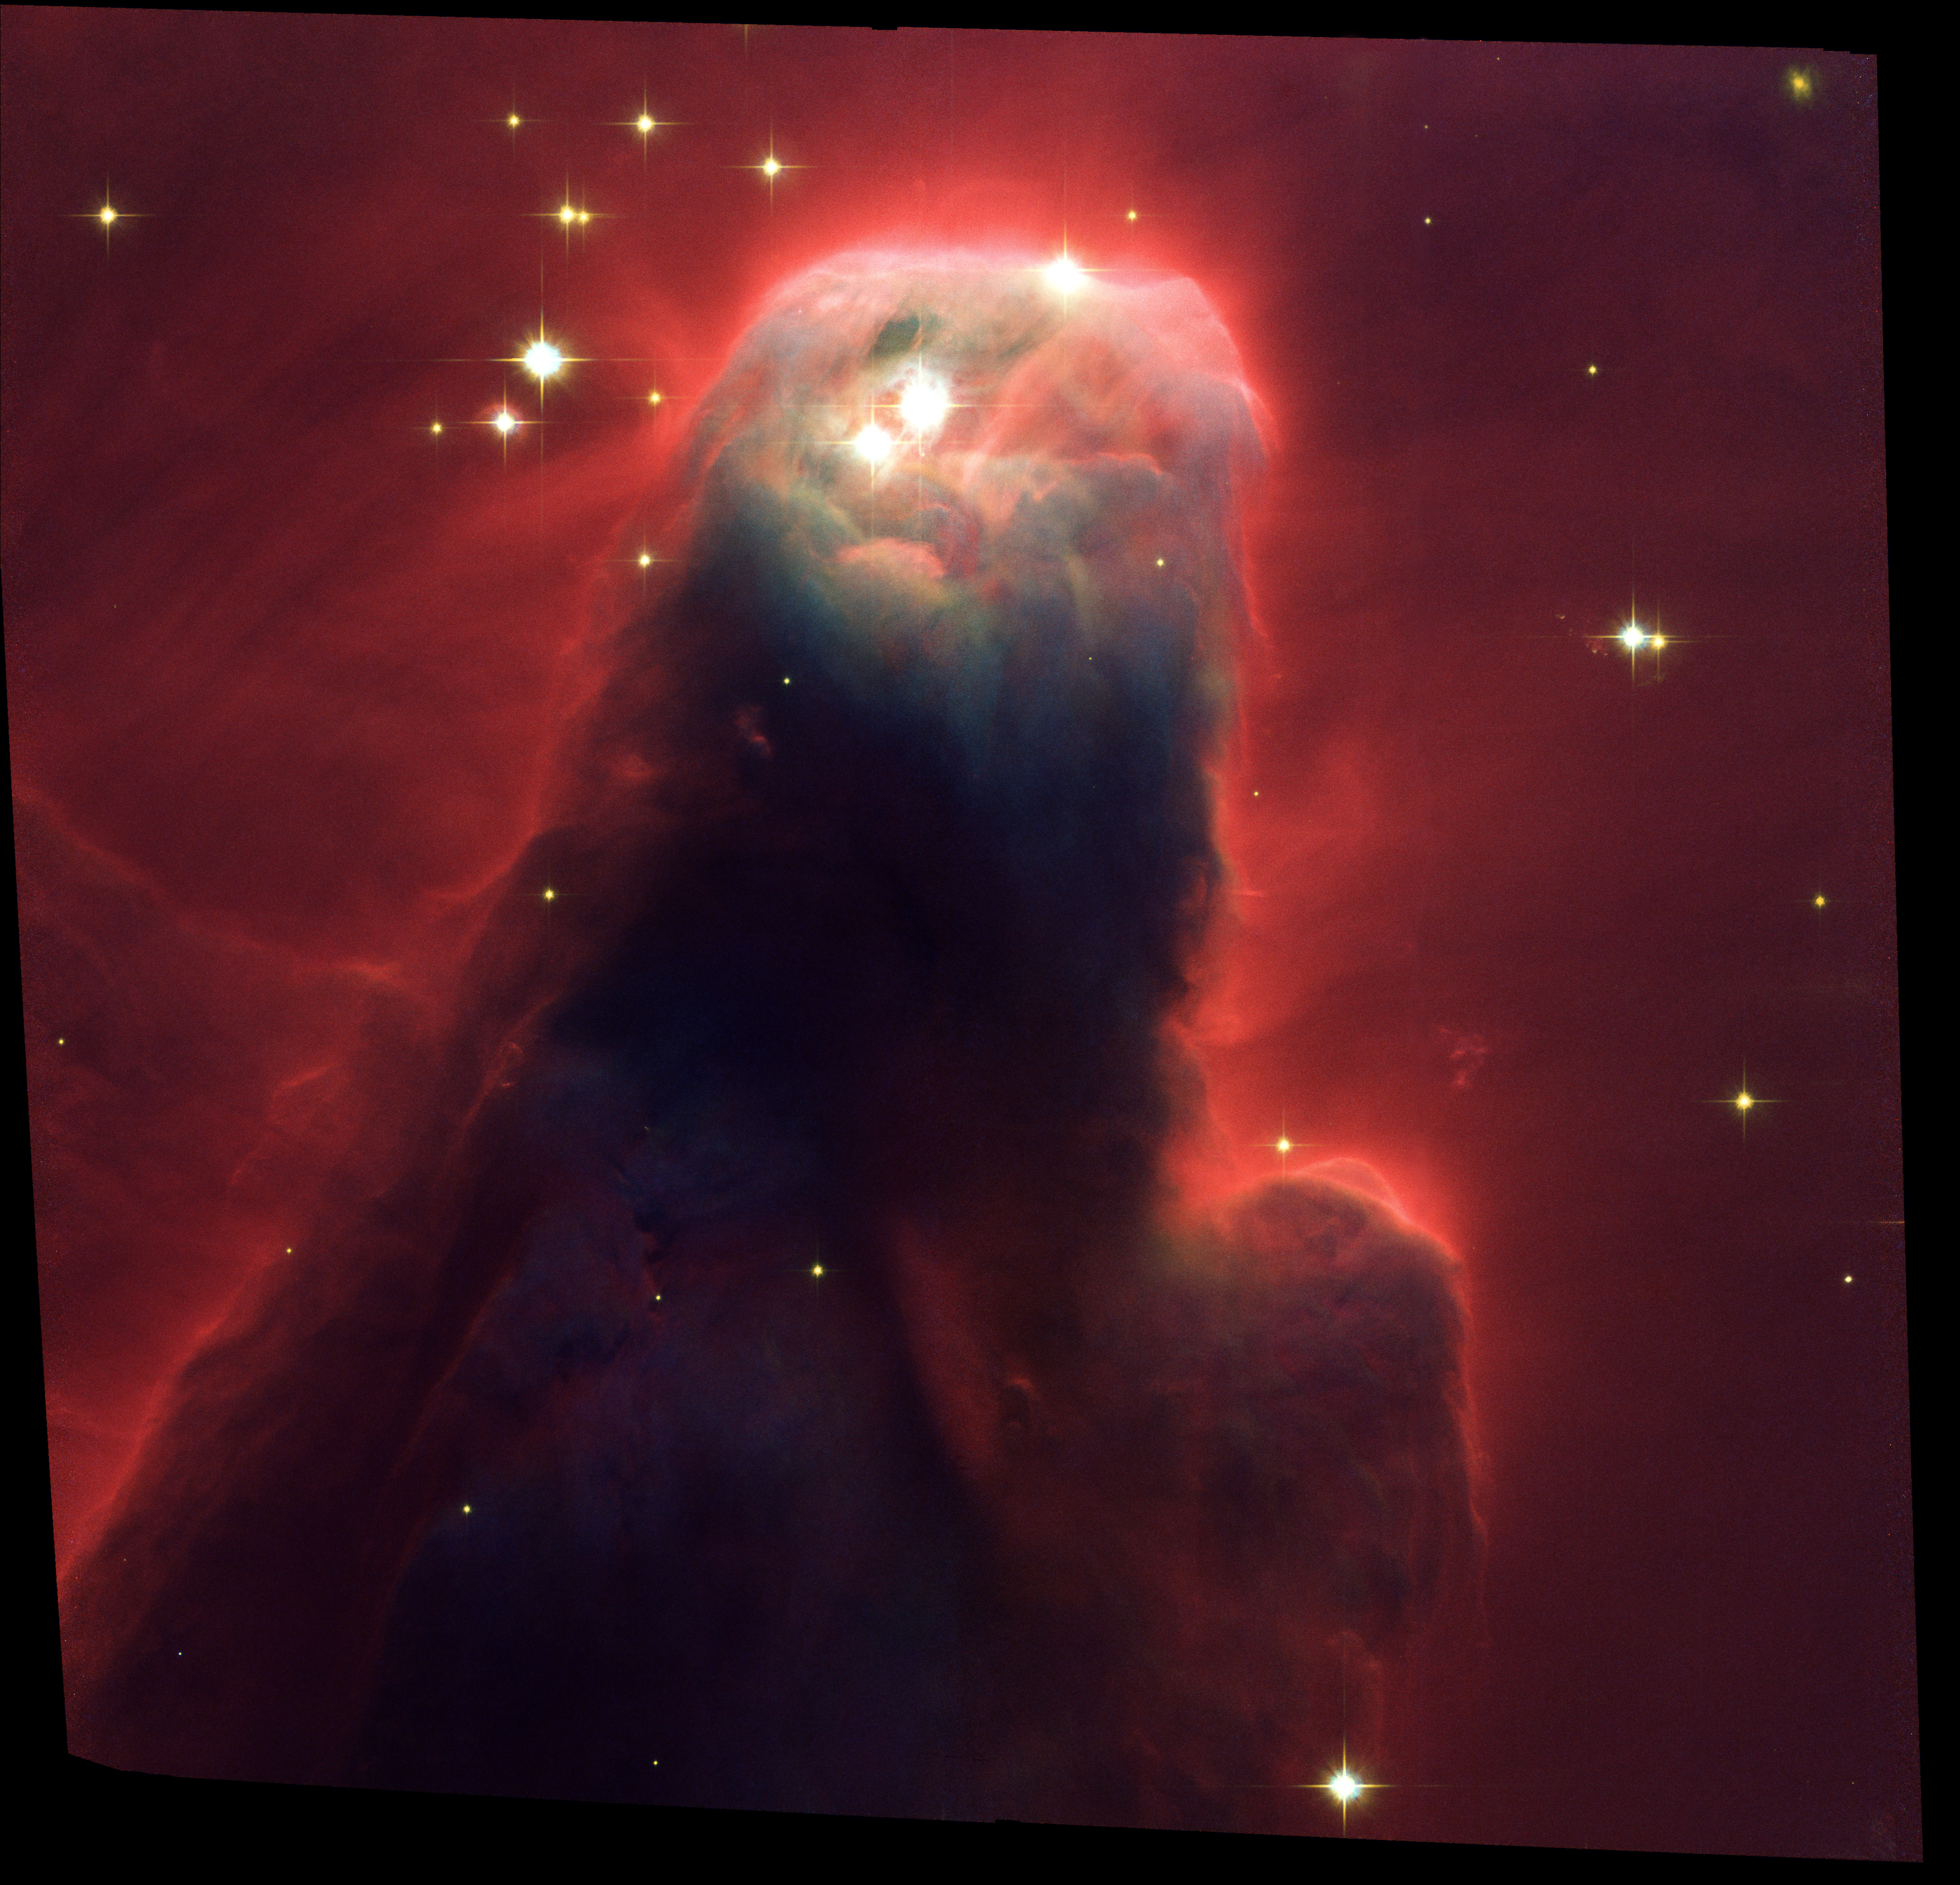

Cone Nebula/NGC 2264 (ACS Full Field Image)

Resembling a nightmarish beast rearing its head from a crimson sea, this monstrous object is actually an innocuous pillar of gas and dust. Called the Cone Nebula (and cataloged NGC 2264) is so named because, in ground-based images, it has a conical shape. This giant pillar resides in a turbulent star-forming region. NASA's Hubble Space Telescope imaged the "Cone Nebula," a nebula close to home. It exhibits a craggy-looking mountaintop of cold gas and dust that is a cousin to Hubble's iconic "pillars of creation" in the Eagle Nebula, photographed in 1995.

Credit: NASA, H. Ford (JHU), G. Illingworth (UCSC/LO), M.Clampin (STScI), G. Hartig (STScI), the ACS Science Team, and ESAThe ACS Science Team: H. Ford, G. Illingworth, M. Clampin, G. Hartig, T. Allen, K. Anderson, F. Bartko, N. Benitez, J. Blakeslee, R. Bouwens, T. Broadhurst, R. Brown, C. Burrows, D. Campbell, E. Cheng, N. Cross, P. Feldman, M. Franx, D. Golimowski, C. Gronwall, R. Kimble, J. Krist, M. Lesser, D. Magee, A. Martel, W. J. McCann, G. Meurer, G. Miley, M. Postman, P. Rosati, M. Sirianni, W. Sparks, P. Sullivan, H. Tran, Z. Tsvetanov, R. White, and R. Woodruff.